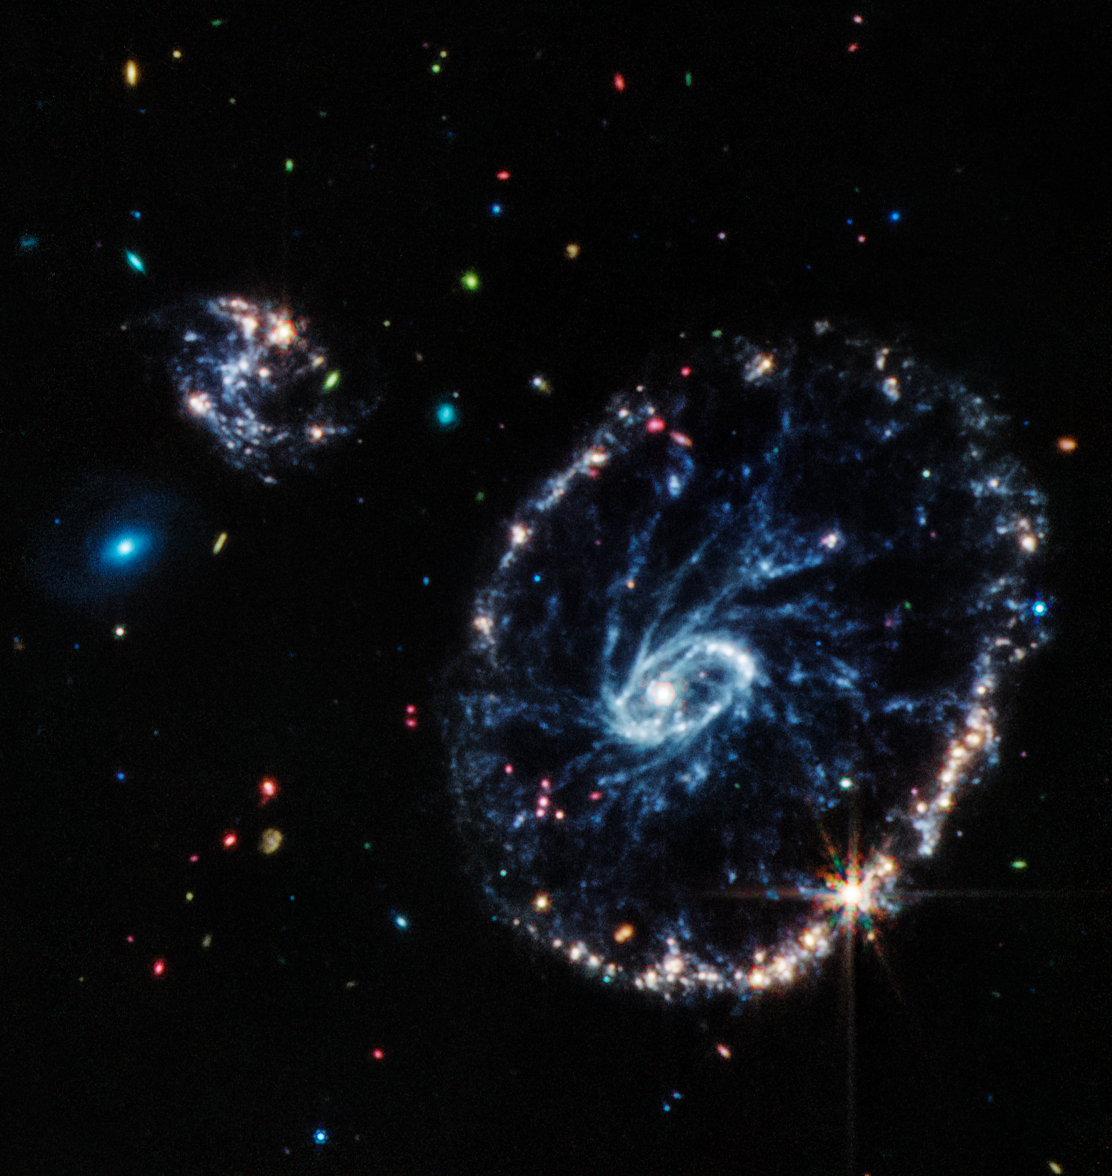

Cartwheel Galaxy (MIRI)

This image from Webb’s Mid-Infrared Instrument (MIRI) shows a group of galaxies, including a large distorted ring-shaped galaxy known as the Cartwheel. The Cartwheel Galaxy, located 500 million light-years away in the Sculptor constellation, is composed of a bright inner ring and an active outer ring. While this outer ring has a lot of star formation, the dusty area in between reveals many stars and star clusters.

The mid-infrared light captured by MIRI reveals fine details about these dusty regions and young stars within the Cartwheel Galaxy, which are rich in hydrocarbons and other chemical compounds, as well as silicate dust, like much of the dust on Earth.

Young stars, many of which are present in the bottom right of the outer ring, energise surrounding hydrocarbon dust, causing it to glow orange. On the other hand, the clearly defined dust between the core and the outer ring, which forms the “spokes” that inspire the galaxy’s name, is mostly silicate dust.

The smaller spiral galaxy to the upper left of Cartwheel displays much of the same behaviour, showing a large amount of star formation.

MIRI was contributed by ESA and NASA, with the instrument designed and built by a consortium of nationally funded European Institutes (the MIRI European Consortium) in partnership with JPL and the University of Arizona.

Credit: NASA, ESA, CSA, STScI